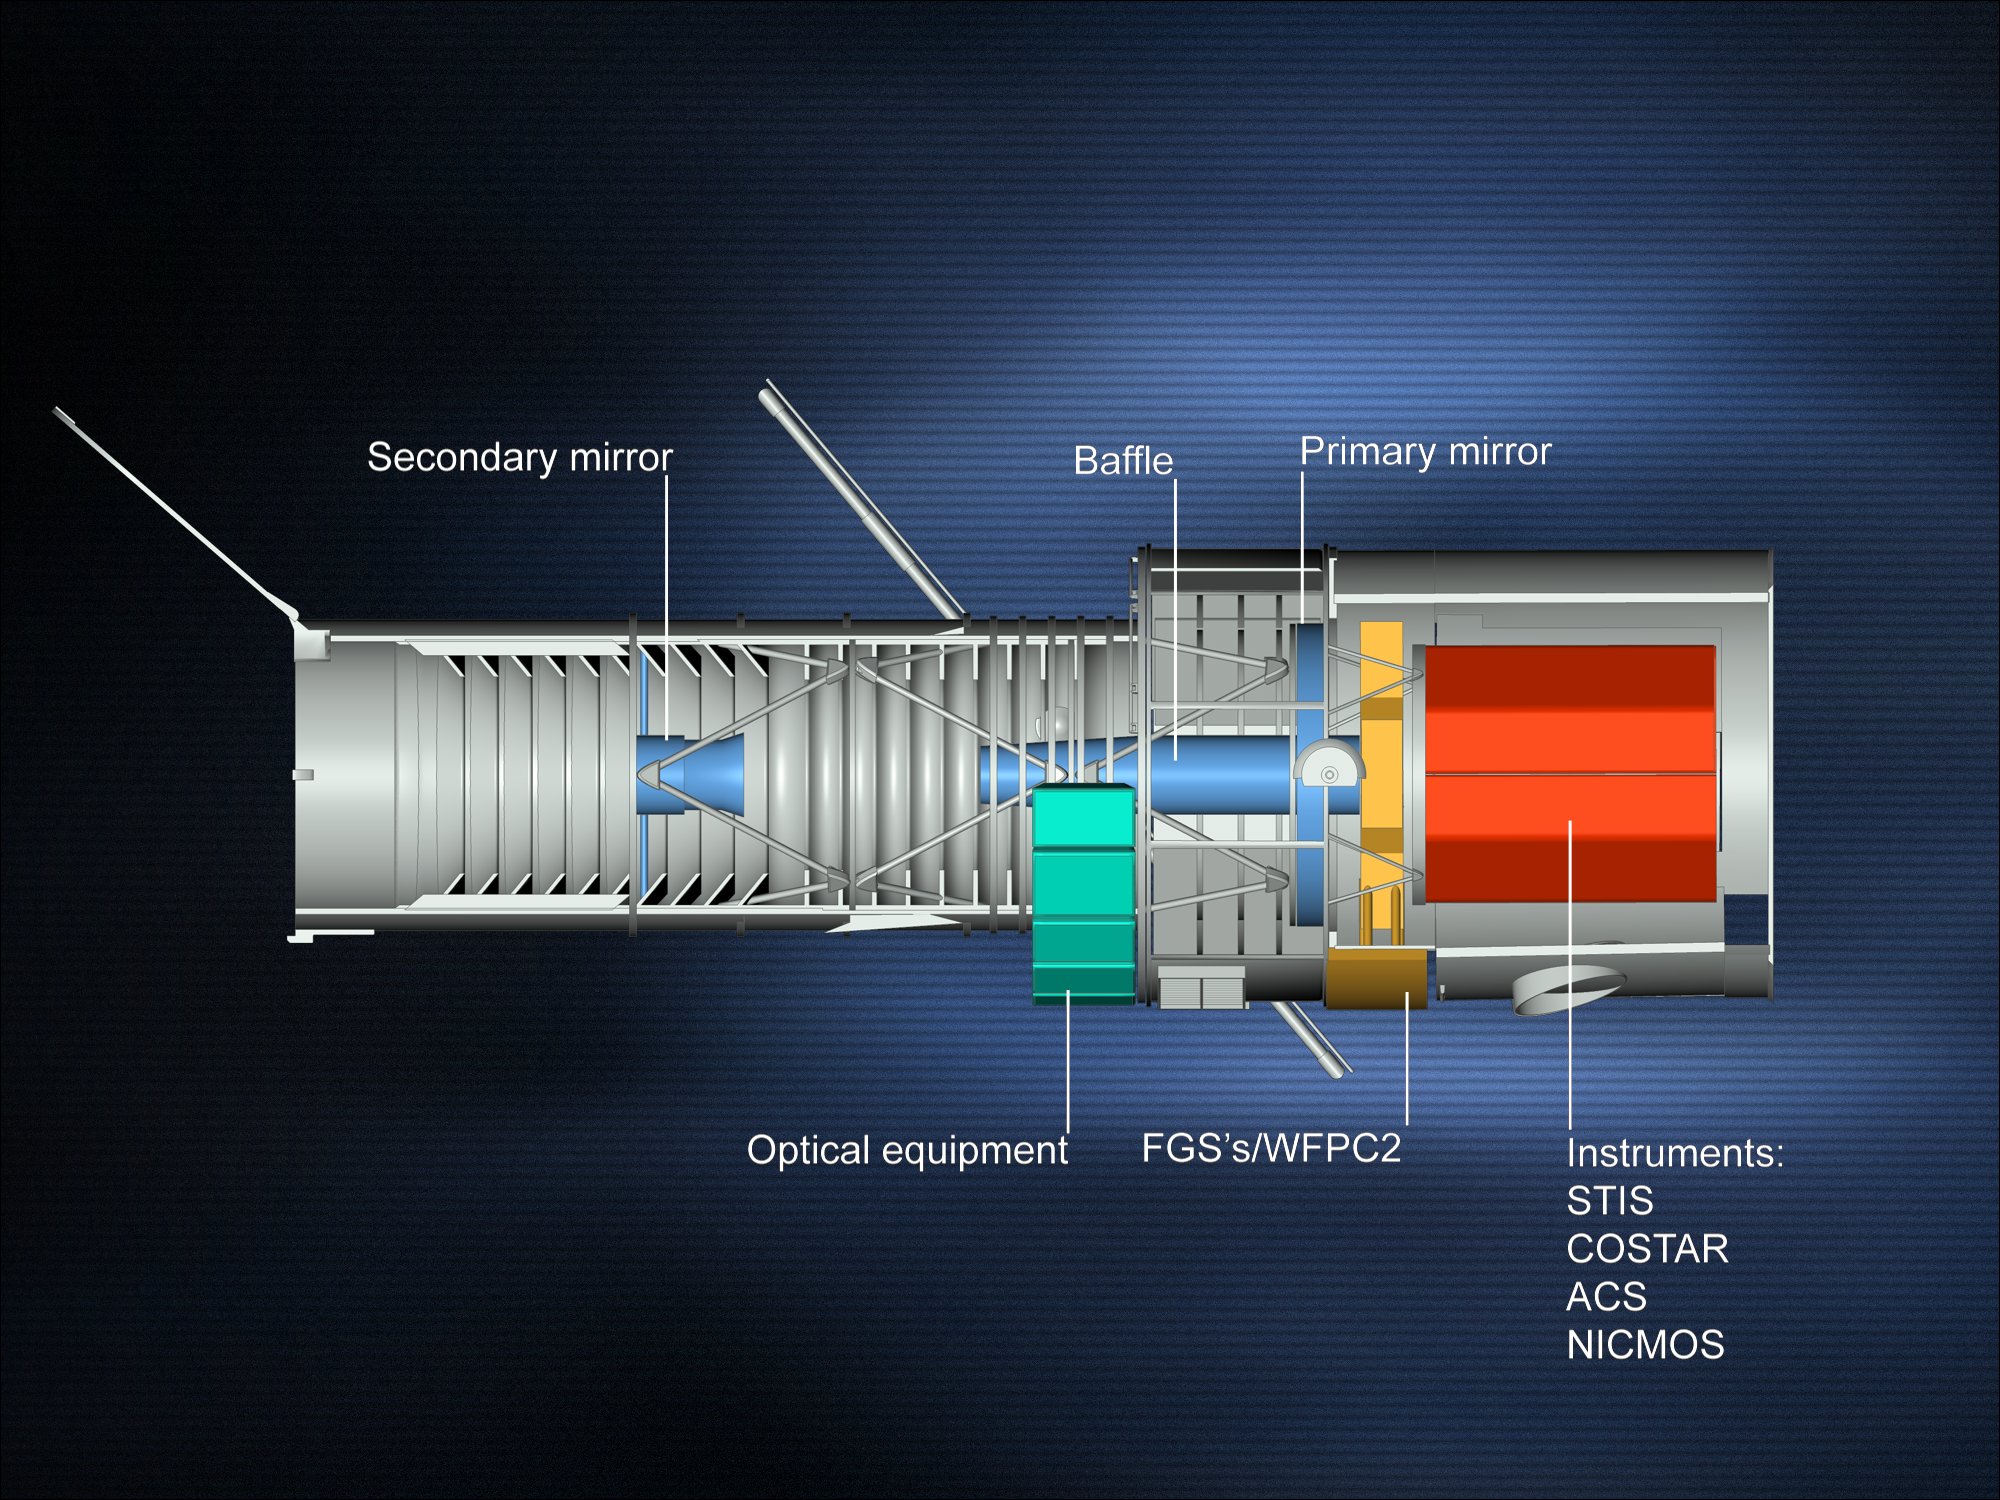

Diagram of Hubble

This shows a cross-section of the NASA/ESA Hubble Space Telescope (HST). The radial instrument bay is seen in yellow, the axial instrument bay in red, the primary and secondary mirrors in blue, and the optical equipment in green.

Credit: ESA